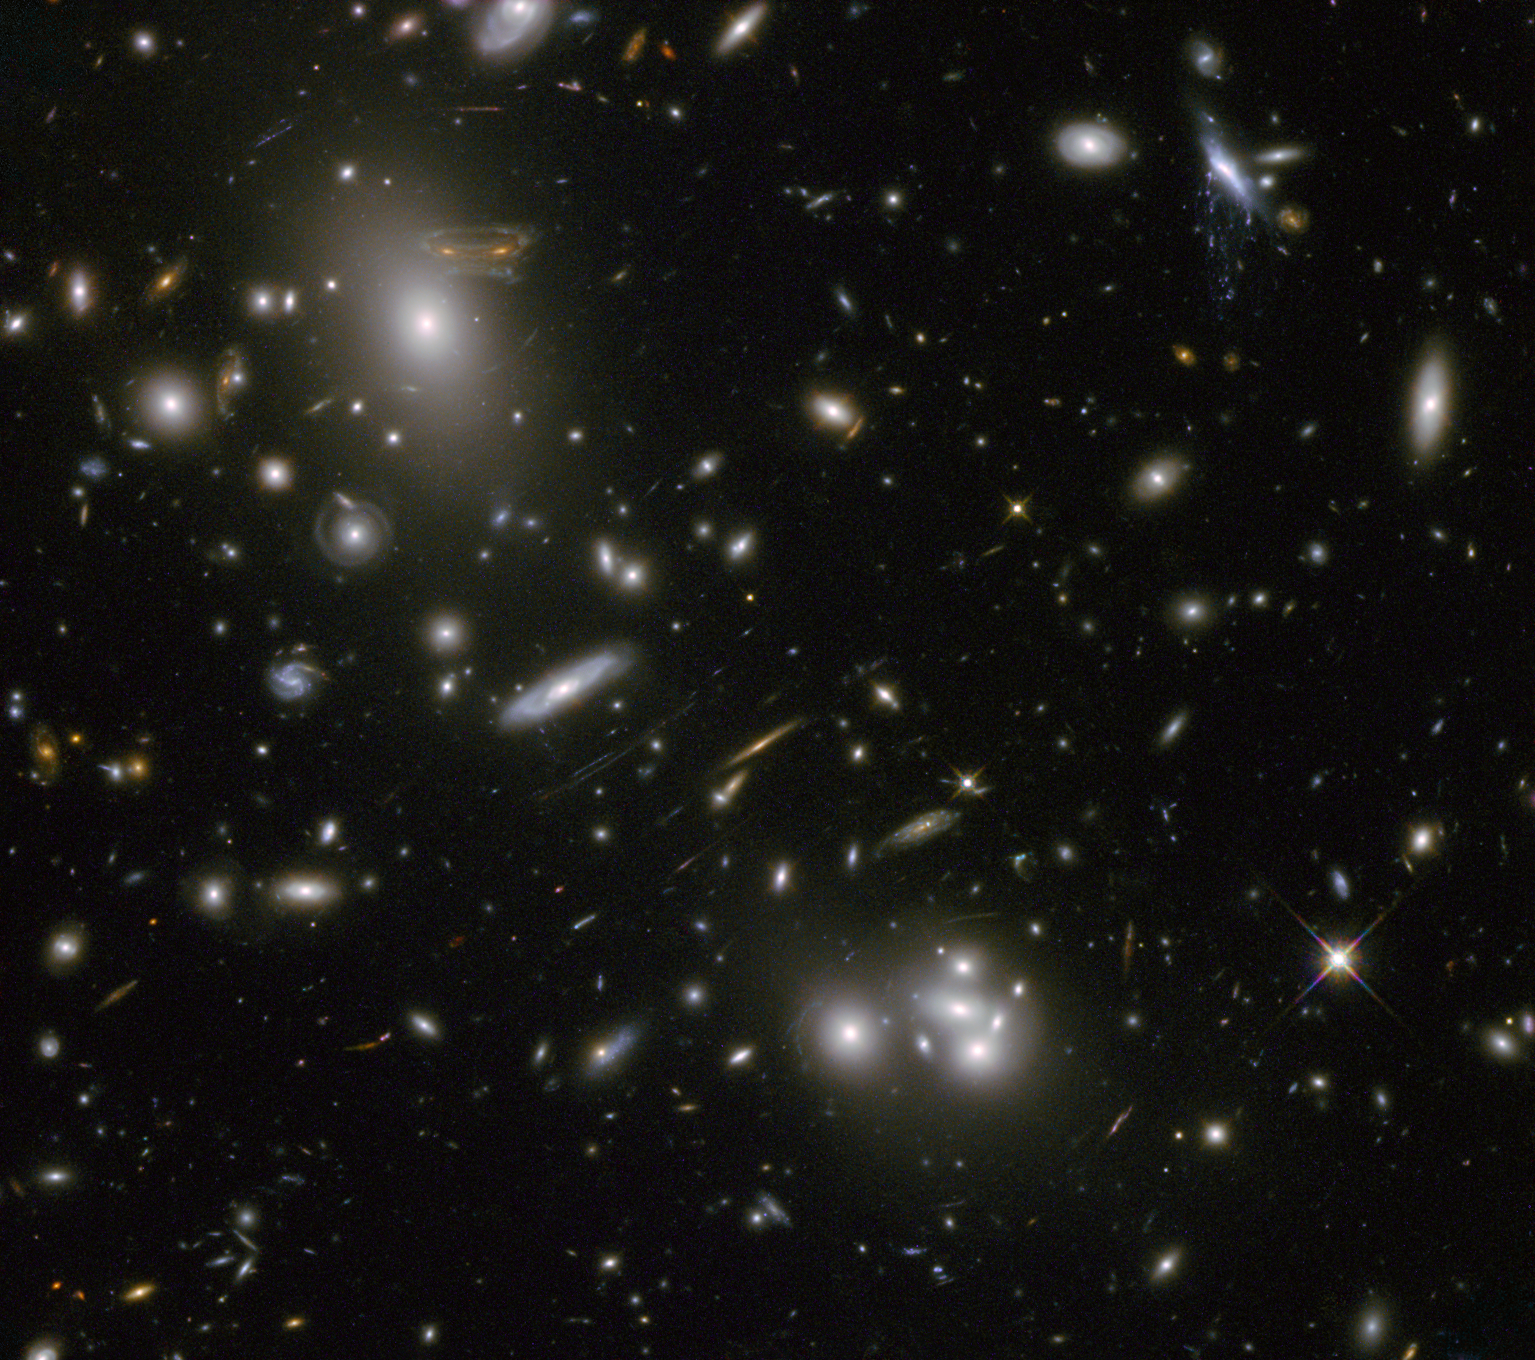

Hubble image of Abell 68

Abell 68, pictured here in infrared light, is a galaxy cluster. The effect of its gravity on light means it boosts Hubble’s power, greatly increasing’the telescopes ability to observe distant and faint objects. The fuzzy collection of blobs in the middle and upper left of the image is a swarm of galaxies, each with hundreds of billions of stars and vast amounts of dark matter. Distorted shapes visible throughout the field of view are distant galaxies whose light has been bent and amplified by the cluster.

Credit: NASA & ESA. Acknowledgement: N. Rose